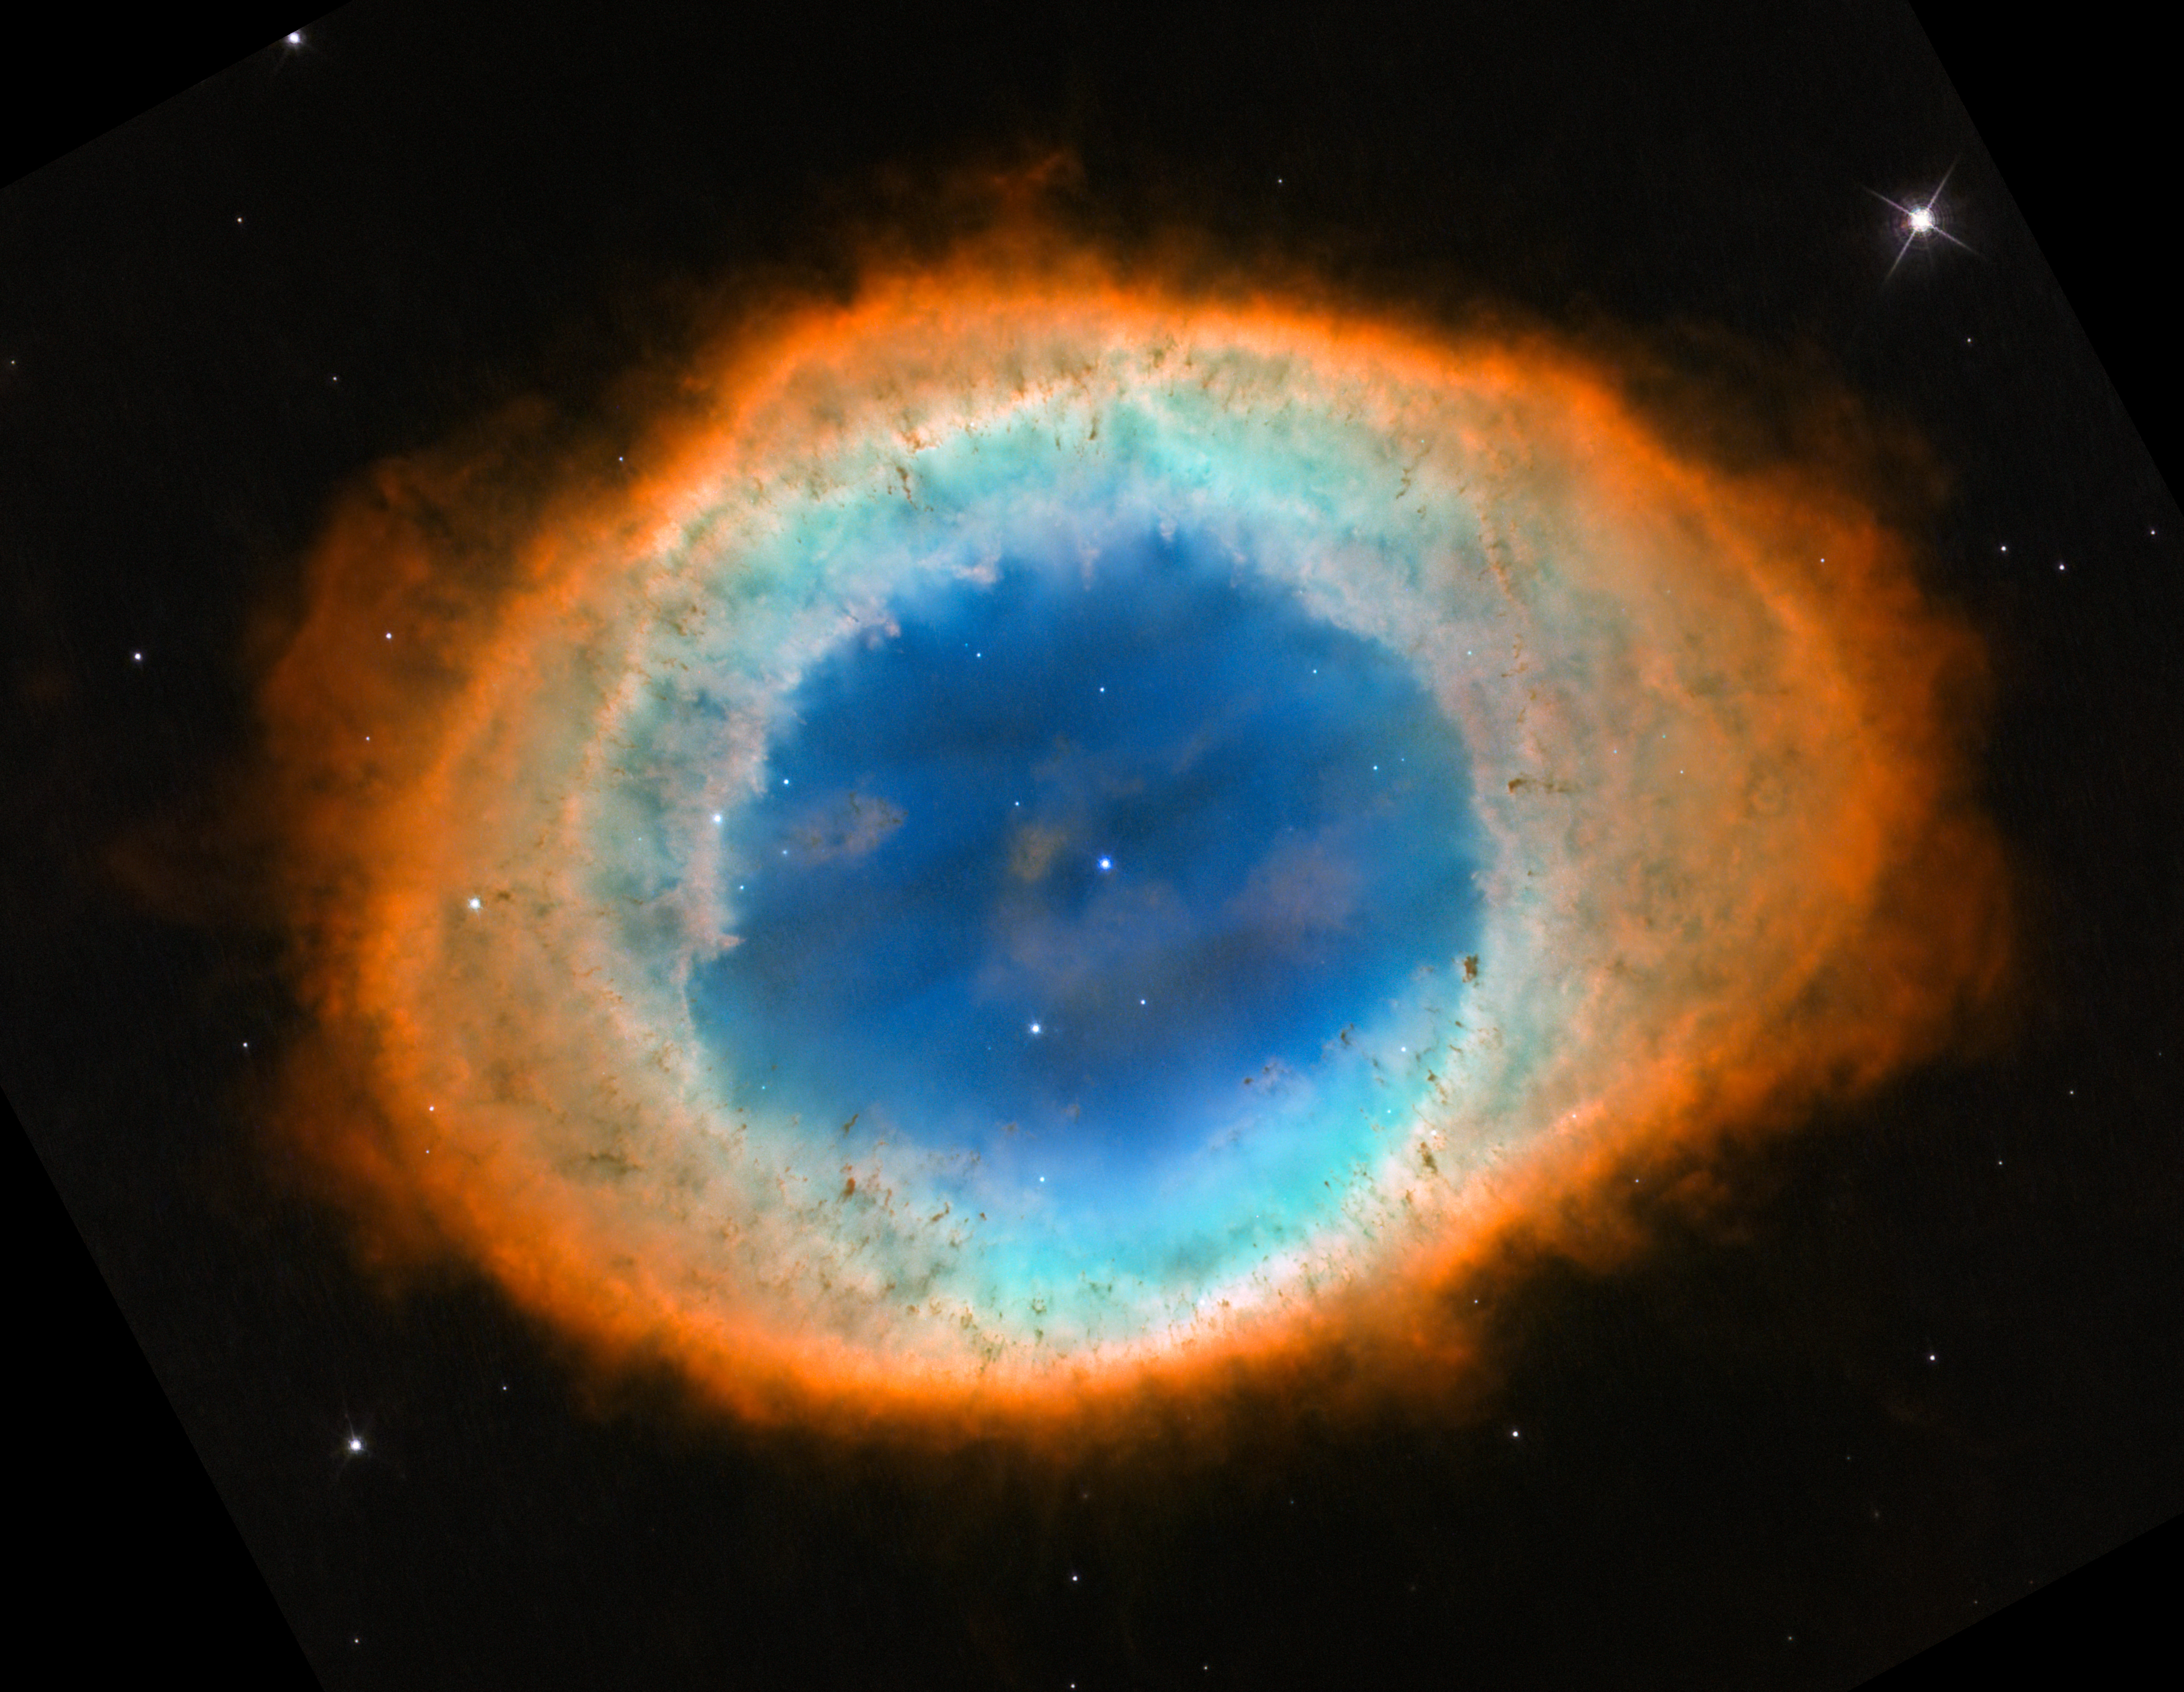

Hubble’s view of the Ring Nebula (2013 image - cropped)

This image from the NASA/ESA Hubble Space Telescope of the Ring Nebula was released in 2013 and has since become one of the observatory’s most well-known images. From Earth’s perspective, the nebula looks roughly elliptical. However, astronomers combined ground-based data with observations by Hubble to explore the object’s structure, evolution, physical conditions and motion. This research revealed that the nebula is shaped like a distorted doughnut.

Credit: NASA, ESA, and C. Robert O’Dell (Vanderbilt University)